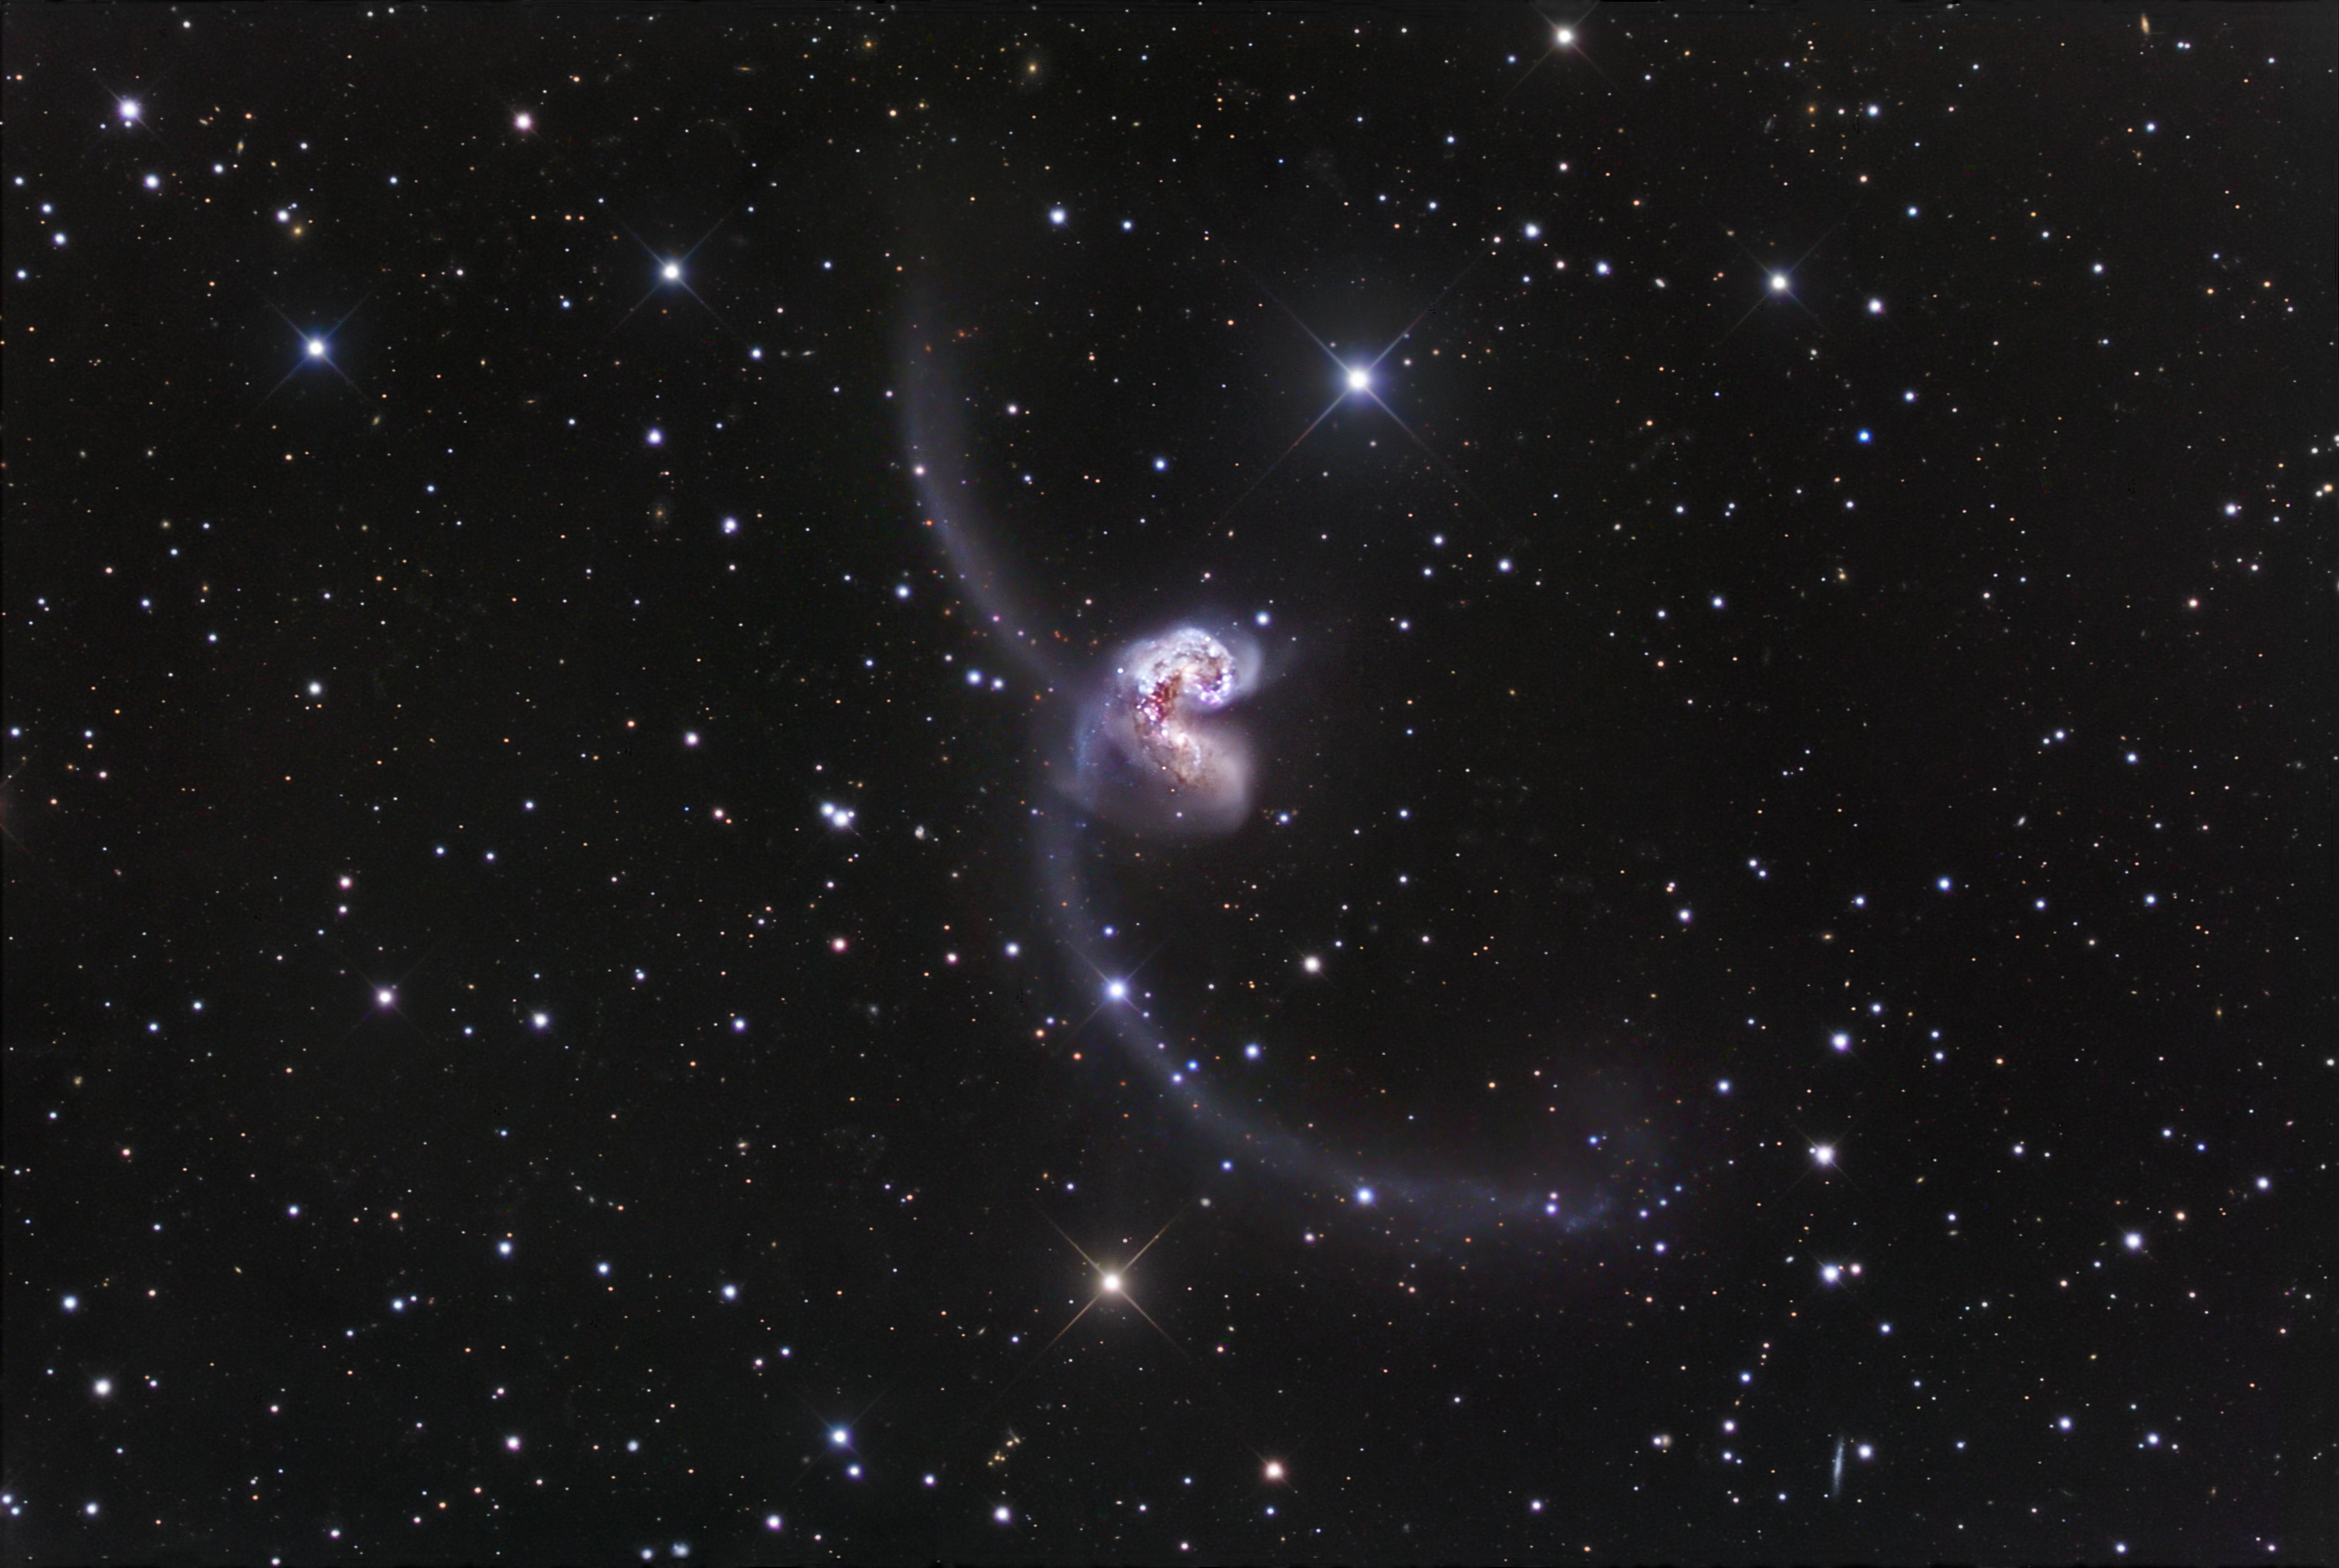

Ground-based image of the Antennae Galaxies

This ground-based image was taken by Robert Gendler and shows the two merging Antennae Galaxies (NGC 4038 and NGC 4039) and their impressive long tidal tails.

Credit: Robert Gendler